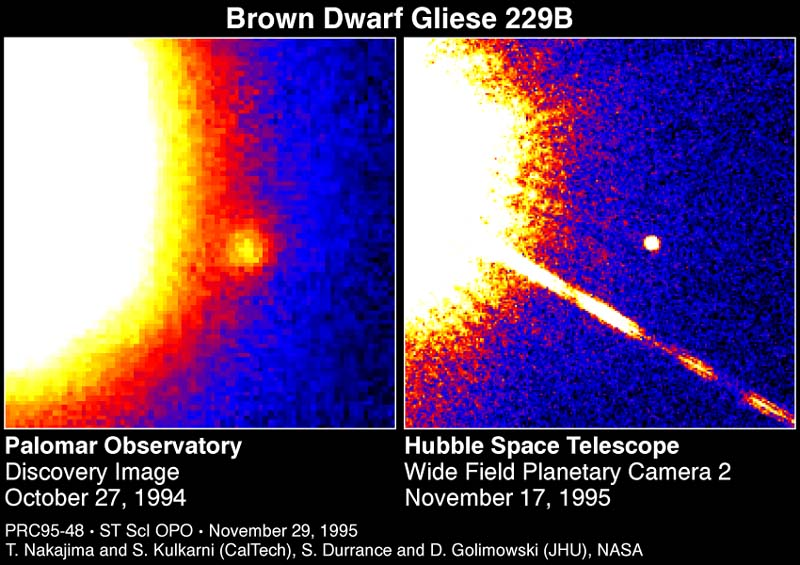

Brown Dwarf Gliese 299B

These two false-color telescope images reveal the faintest object ever seen around a star beyond our Sun, and the first unambiguous detection of a brown dwarf. The brown dwarf, called GL229B, orbits the red dwarf star Gliese 229, located approximately 18 light-years away in the constellation Lepus. The brown dwarf is about 20-50 times the mass of Jupiter, but is so dense it is about the same diameter as Jupiter (80, 000 miles or 130, 000 kilometres).

Credit: S. Kulkarni (Caltech), D.Golimowski (JHU) and NASA/ESA